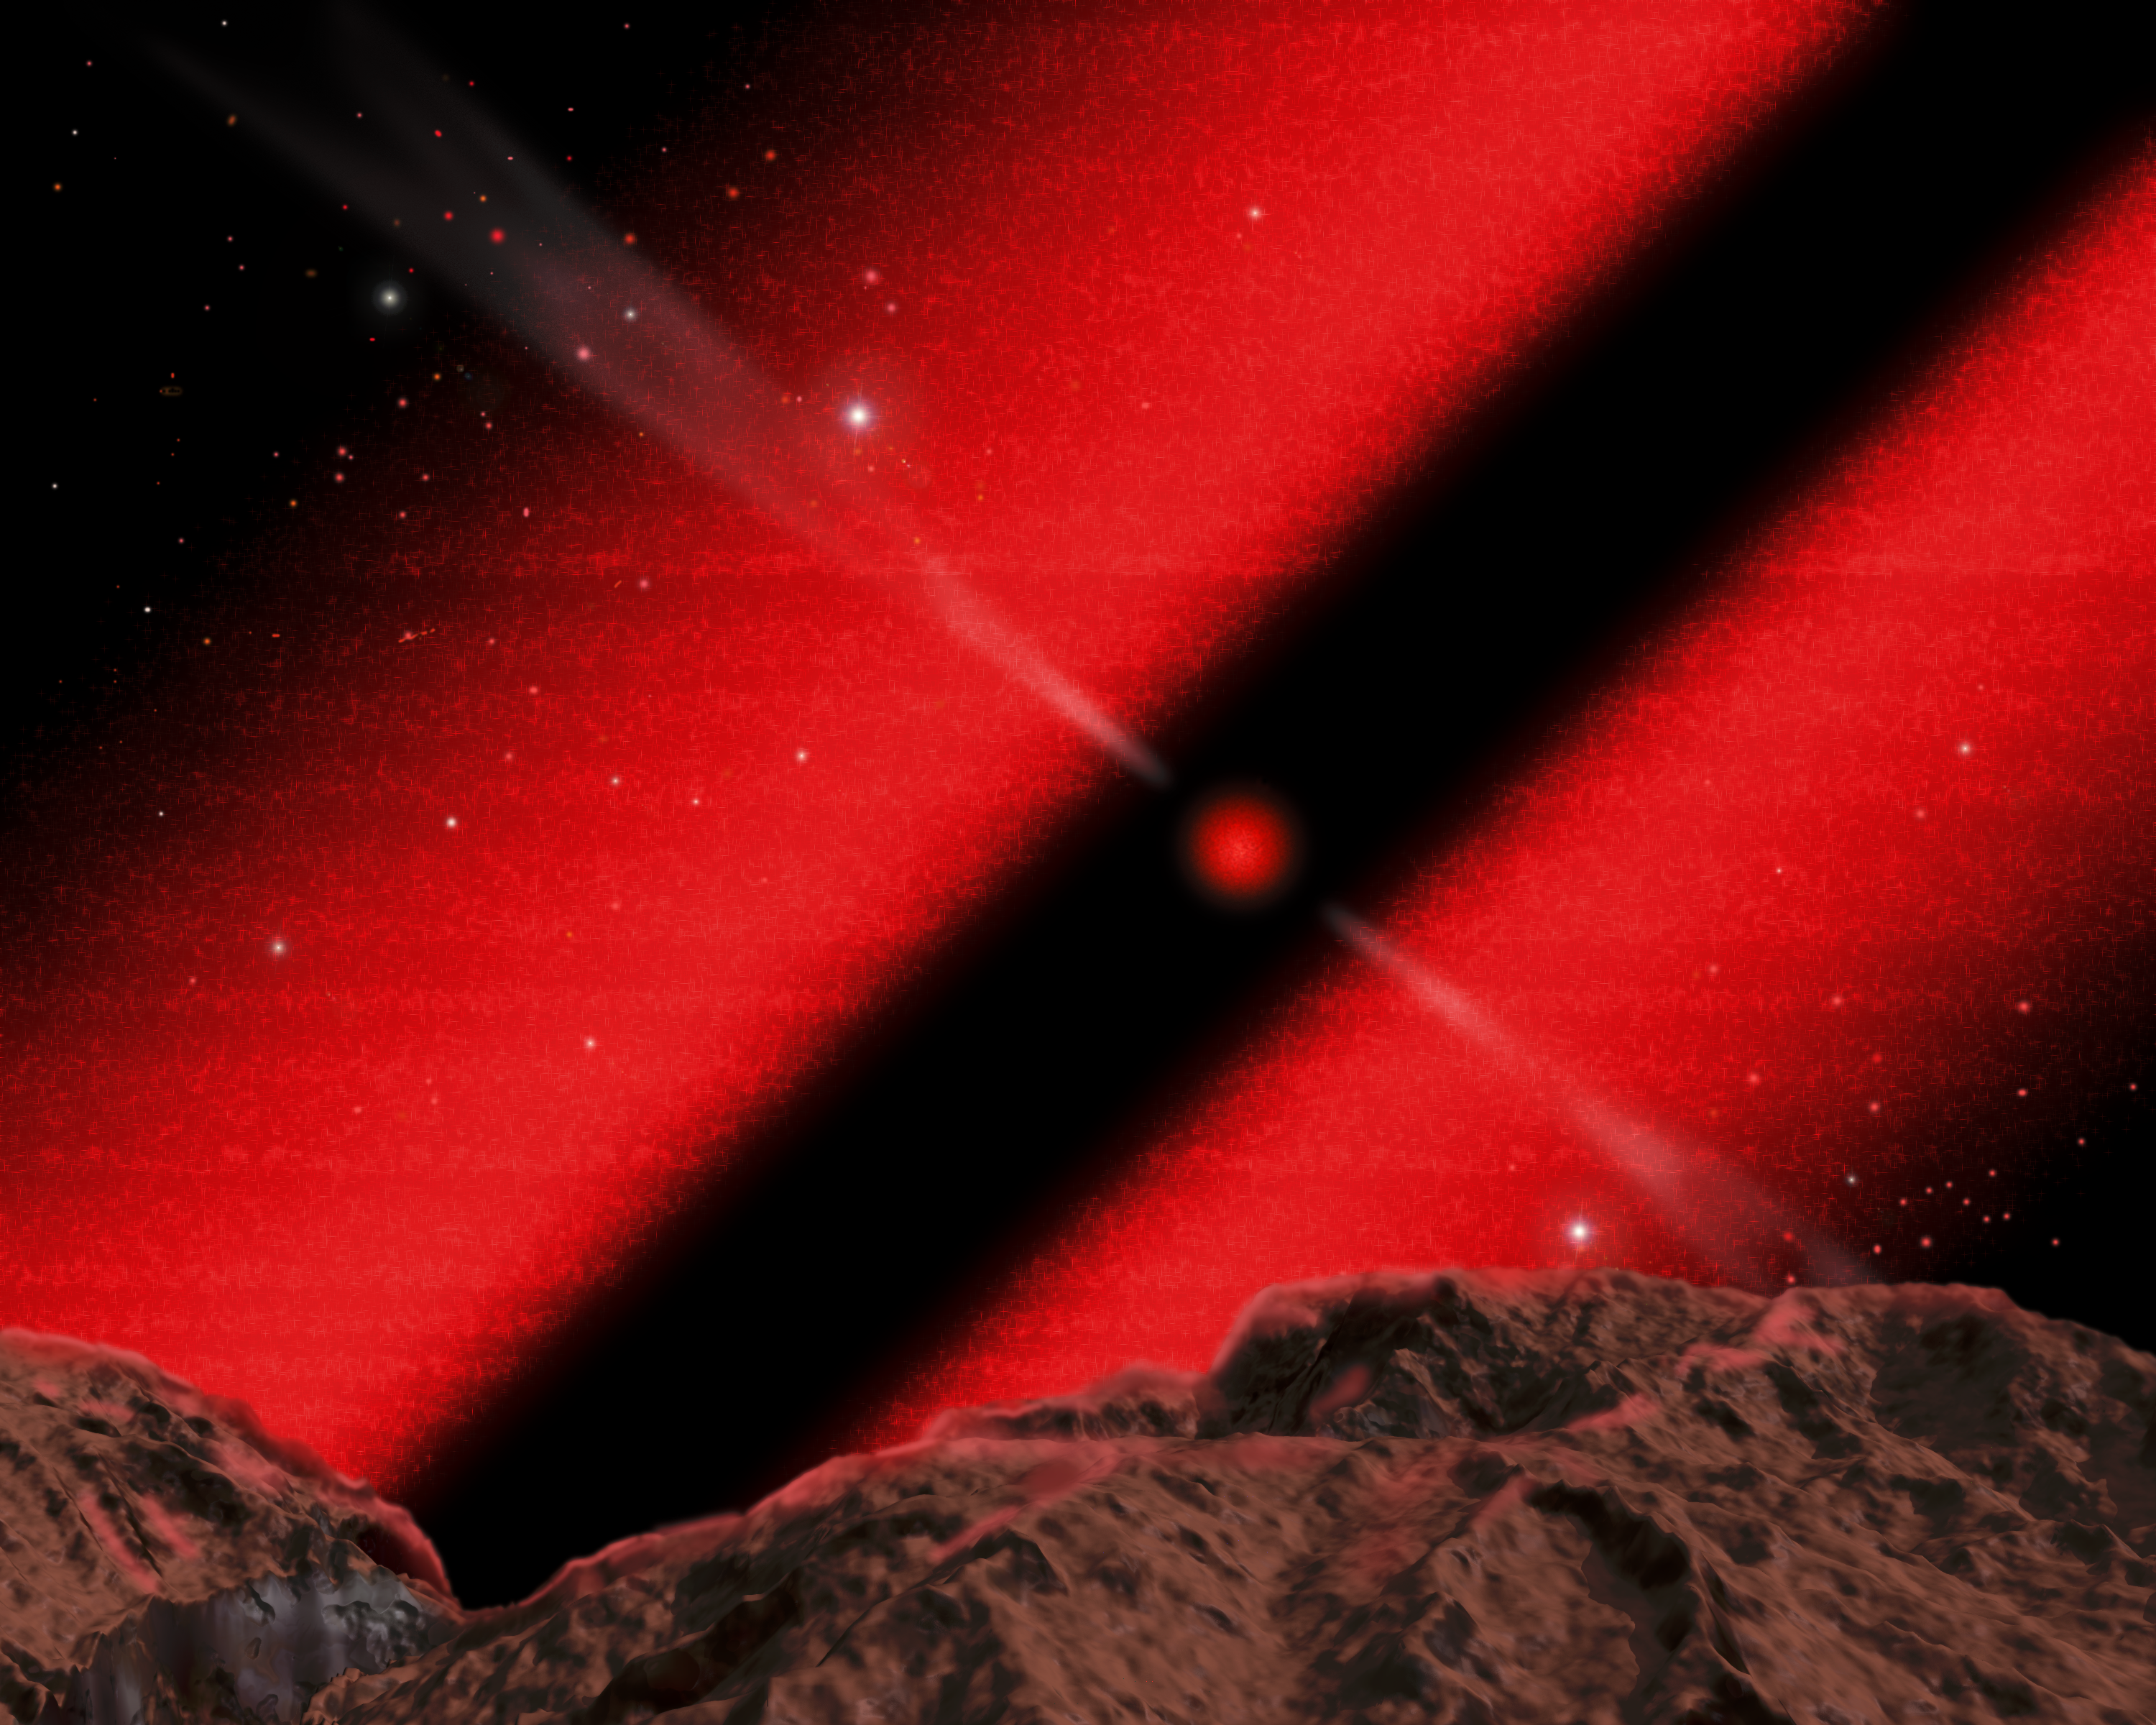

Core of Galaxy NGC 4261- Artist Concept

This is an illustration of how the night sky might look to a dweller in the core of galaxy NGC 4261, which harbors an 800-light-year-wide disk of dust and 1.2 billion-solar-mass black hole.

This imaginary view is from a hypothetical planet inside the dust dusk, looking toward the black hole. The black hole's white-hot glow from super-heated gas is reddened by intervening dust.

Credit: J. Gitlin ( Space Telescope Science Institute)